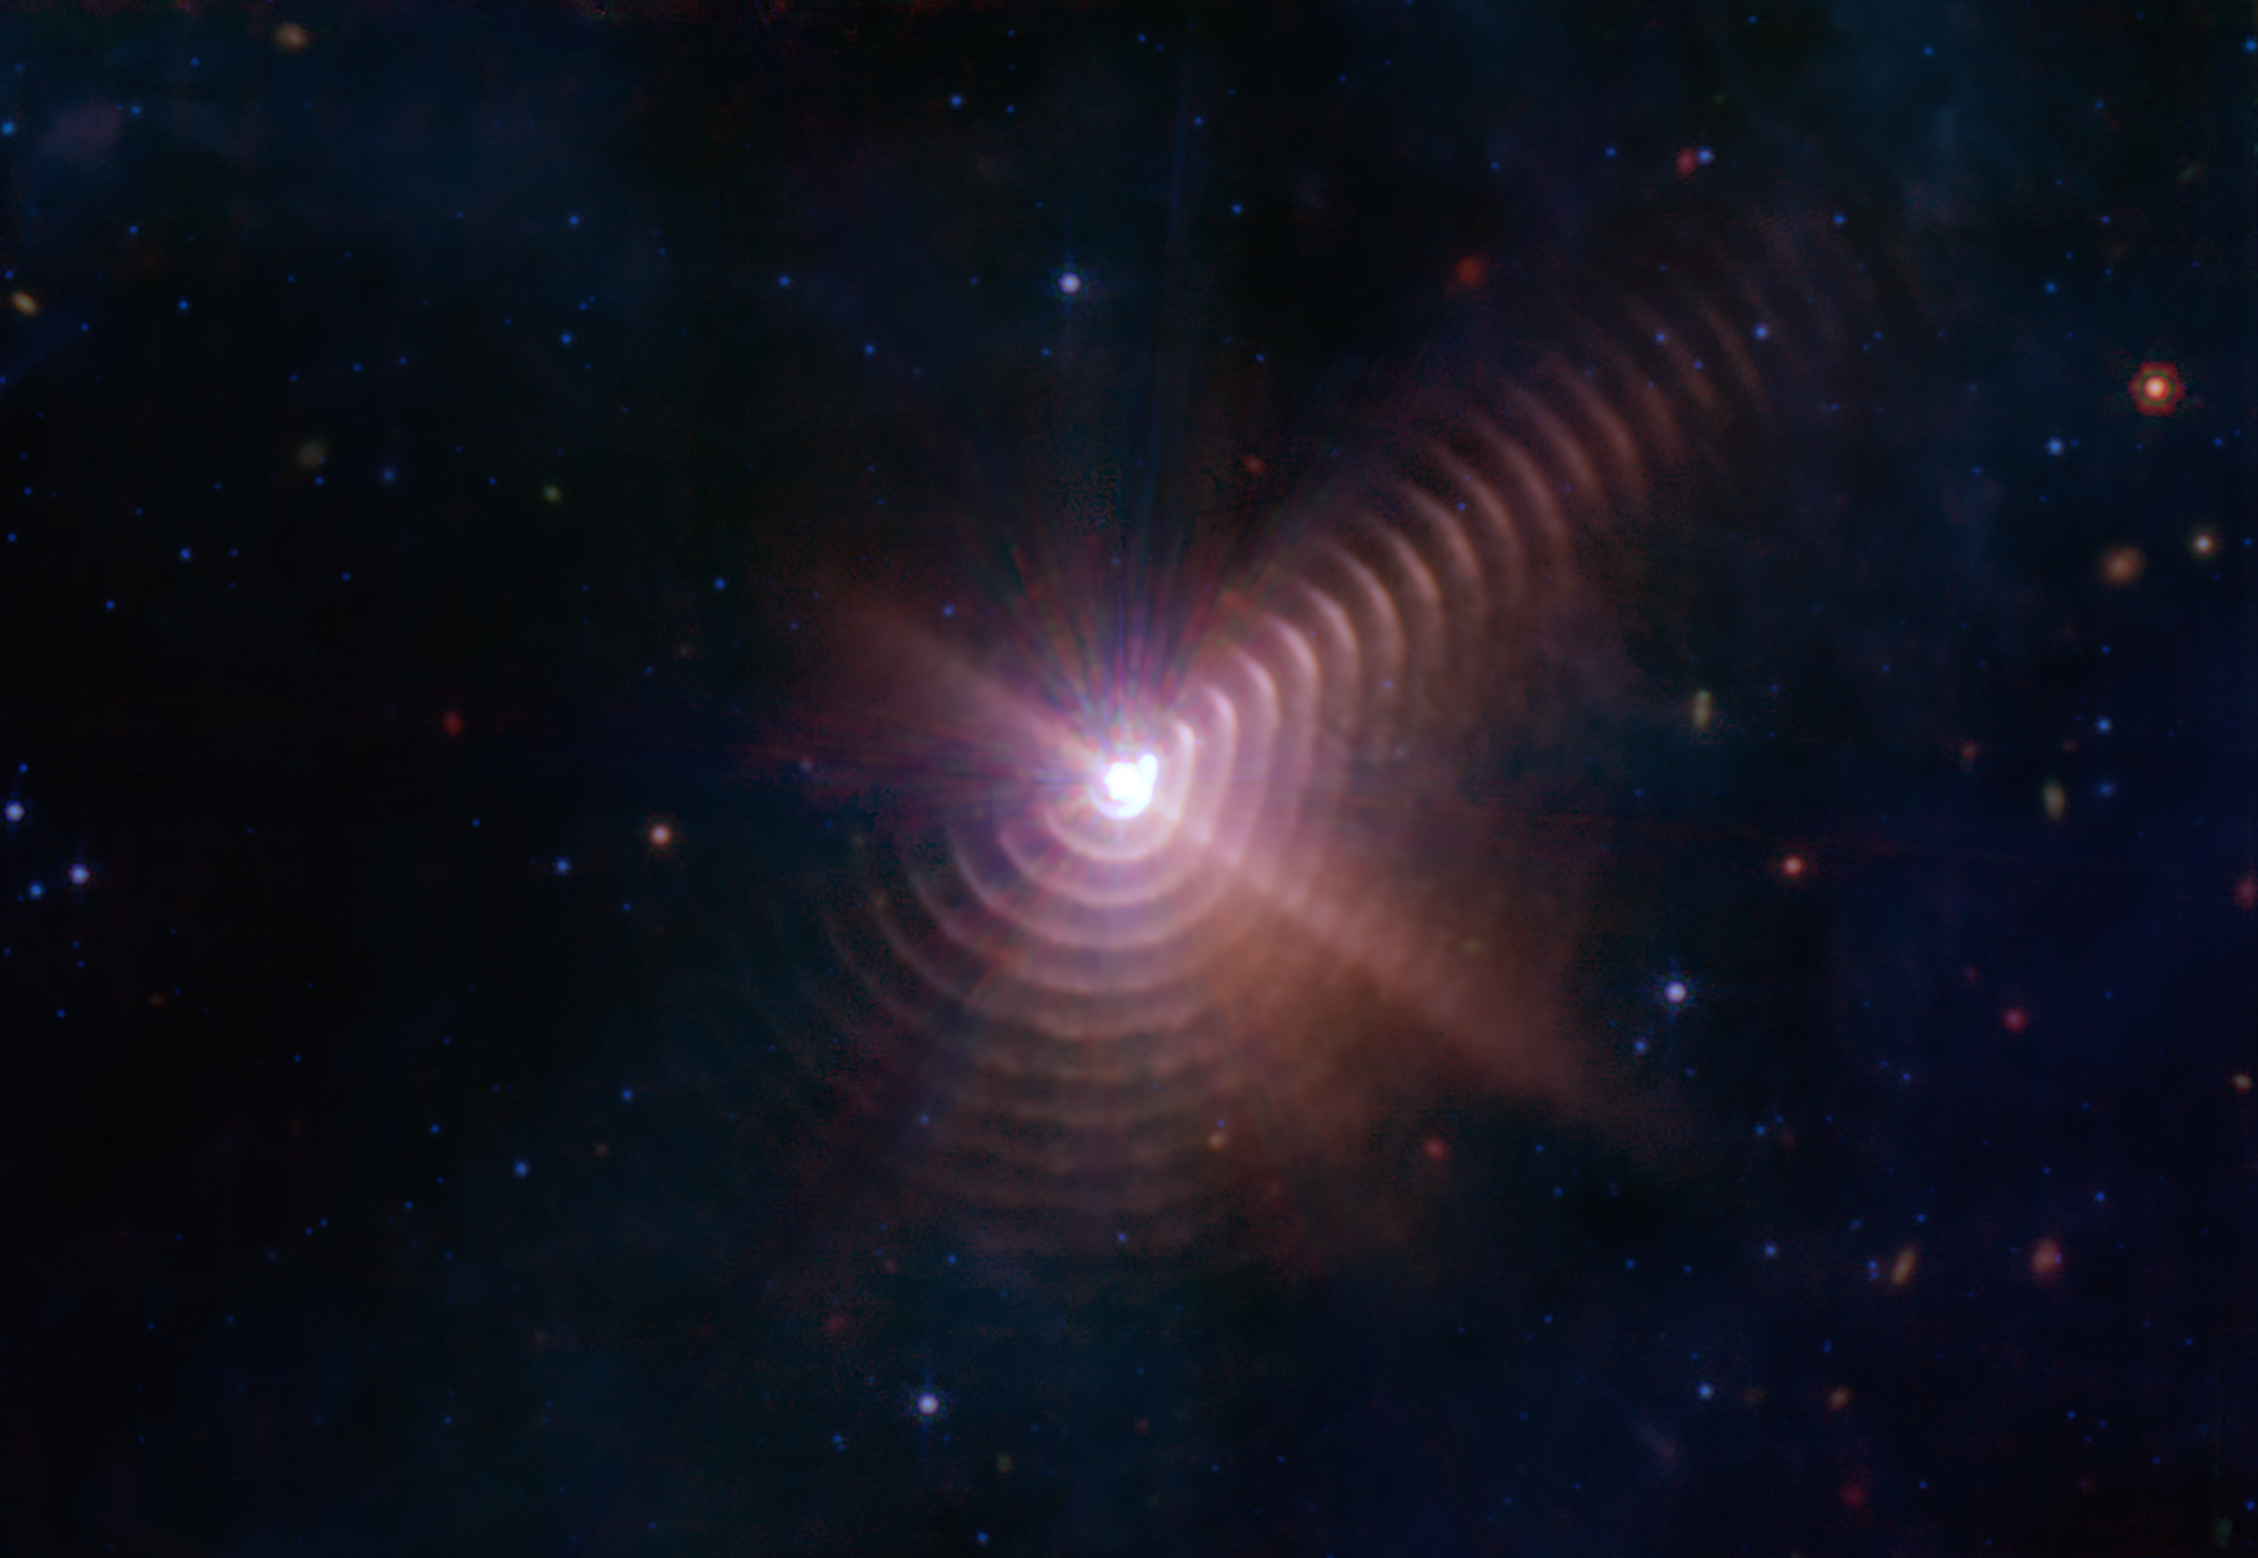

Webb Finds Star Duo Forms ‘Fingerprint’ in Space

A new image from the NASA/ESA/CSA James Webb Space Telescope reveals a remarkable cosmic sight: at least 17 concentric dust rings emanating from a pair of stars. Located just over 5,000 light-years from Earth, the duo is collectively known as Wolf-Rayet 140.

Each ring was created when the two stars came close together and their stellar winds (streams of gas they blow into space) met, compressing the gas and forming dust. The stars’ orbits bring them together about once every eight years; like the rings of a tree’s trunk, the dust loops mark the passage of time.

In addition to Webb’s overall sensitivity, its Mid-Infrared Instrument (MIRI) is uniquely qualified to study the dust rings, what Ryan Lau, the lead author from NSF's NOIRLab, and his colleagues call shells, because they are thicker and wider than they appear in the image. Webb’s science instruments detect infrared light, a range of wavelengths invisible to the human eye.

MIRI detects the longest infrared wavelengths, which means it can often see cooler objects – including the dust rings – than Webb’s other instruments can. MIRI’s spectrometer also revealed the composition of the dust, formed mostly from material ejected by a type of star known as a Wolf-Rayet star.

A Wolf-Rayet star is born with at least 25 times more mass than our Sun and is nearing the end of its life, when it will likely collapse directly to black hole, or explode as a supernova. Burning hotter than in its youth, a Wolf-Rayet star generates powerful winds that push huge amounts of gas into space. The Wolf-Rayet star in this particular pair may have shed more than half its original mass via this process.

Forming Dust in the Wind
Transforming gas into dust is somewhat like turning flour into bread: It requires specific conditions and ingredients. The most common element found in stars, hydrogen, can’t form dust on its own. But because Wolf-Rayet stars shed so much mass, they also eject more complex elements typically found deep in a star’s interior, including carbon. The heavy elements in the wind cool as they travel into space and are then compressed where the winds from both stars meet, like when two hands knead dough.

Some other Wolf-Rayet systems form dust, but none is known to make rings like Wolf-Rayet 140 does. The unique ring pattern forms because the orbit of the Wolf-Rayet star in WR 140 is elongated, not circular. Only when the stars come close together – about the same distance between Earth and the Sun – and their winds collide is the gas under sufficient pressure to form dust. With circular orbits, Wolf-Rayet binaries can produce dust continuously.

The science team thinks WR 140’s winds also swept the surrounding area clear of residual material they might otherwise collide with, which may be why the rings remain so pristine rather than smeared or dispersed. There are likely even more rings that have become so faint and dispersed, not even Webb can see them in the data.

Wolf-Rayet stars may seem exotic compared to our Sun, but they may have played a role in star and planet formation. When a Wolf-Rayet star clears an area, the swept-up material can pile up at the outskirts and become dense enough for new stars to form. There is some evidence the Sun formed in such a scenario.

Using data from MIRI’s Medium Resolution Spectroscopy mode, the new study provides the best evidence yet that Wolf-Rayet stars produce carbon-rich dust molecules. What’s more, the preservation of the dust shells indicates that this dust can survive in the hostile environment between stars, going on to supply material for future stars and planets.

The catch is that while astronomers estimate that there should be at least a few thousand Wolf-Rayet stars in our galaxy, only about 600 have been found to date.

These results have been published today in Nature Astronomy.

MIRI was contributed by ESA and NASA, with the instrument designed and built by a consortium of nationally funded European Institutes (the MIRI European Consortium) in partnership with JPL and the University of Arizona.

Credit: NASA, ESA, CSA, STScI, JPL-Caltech